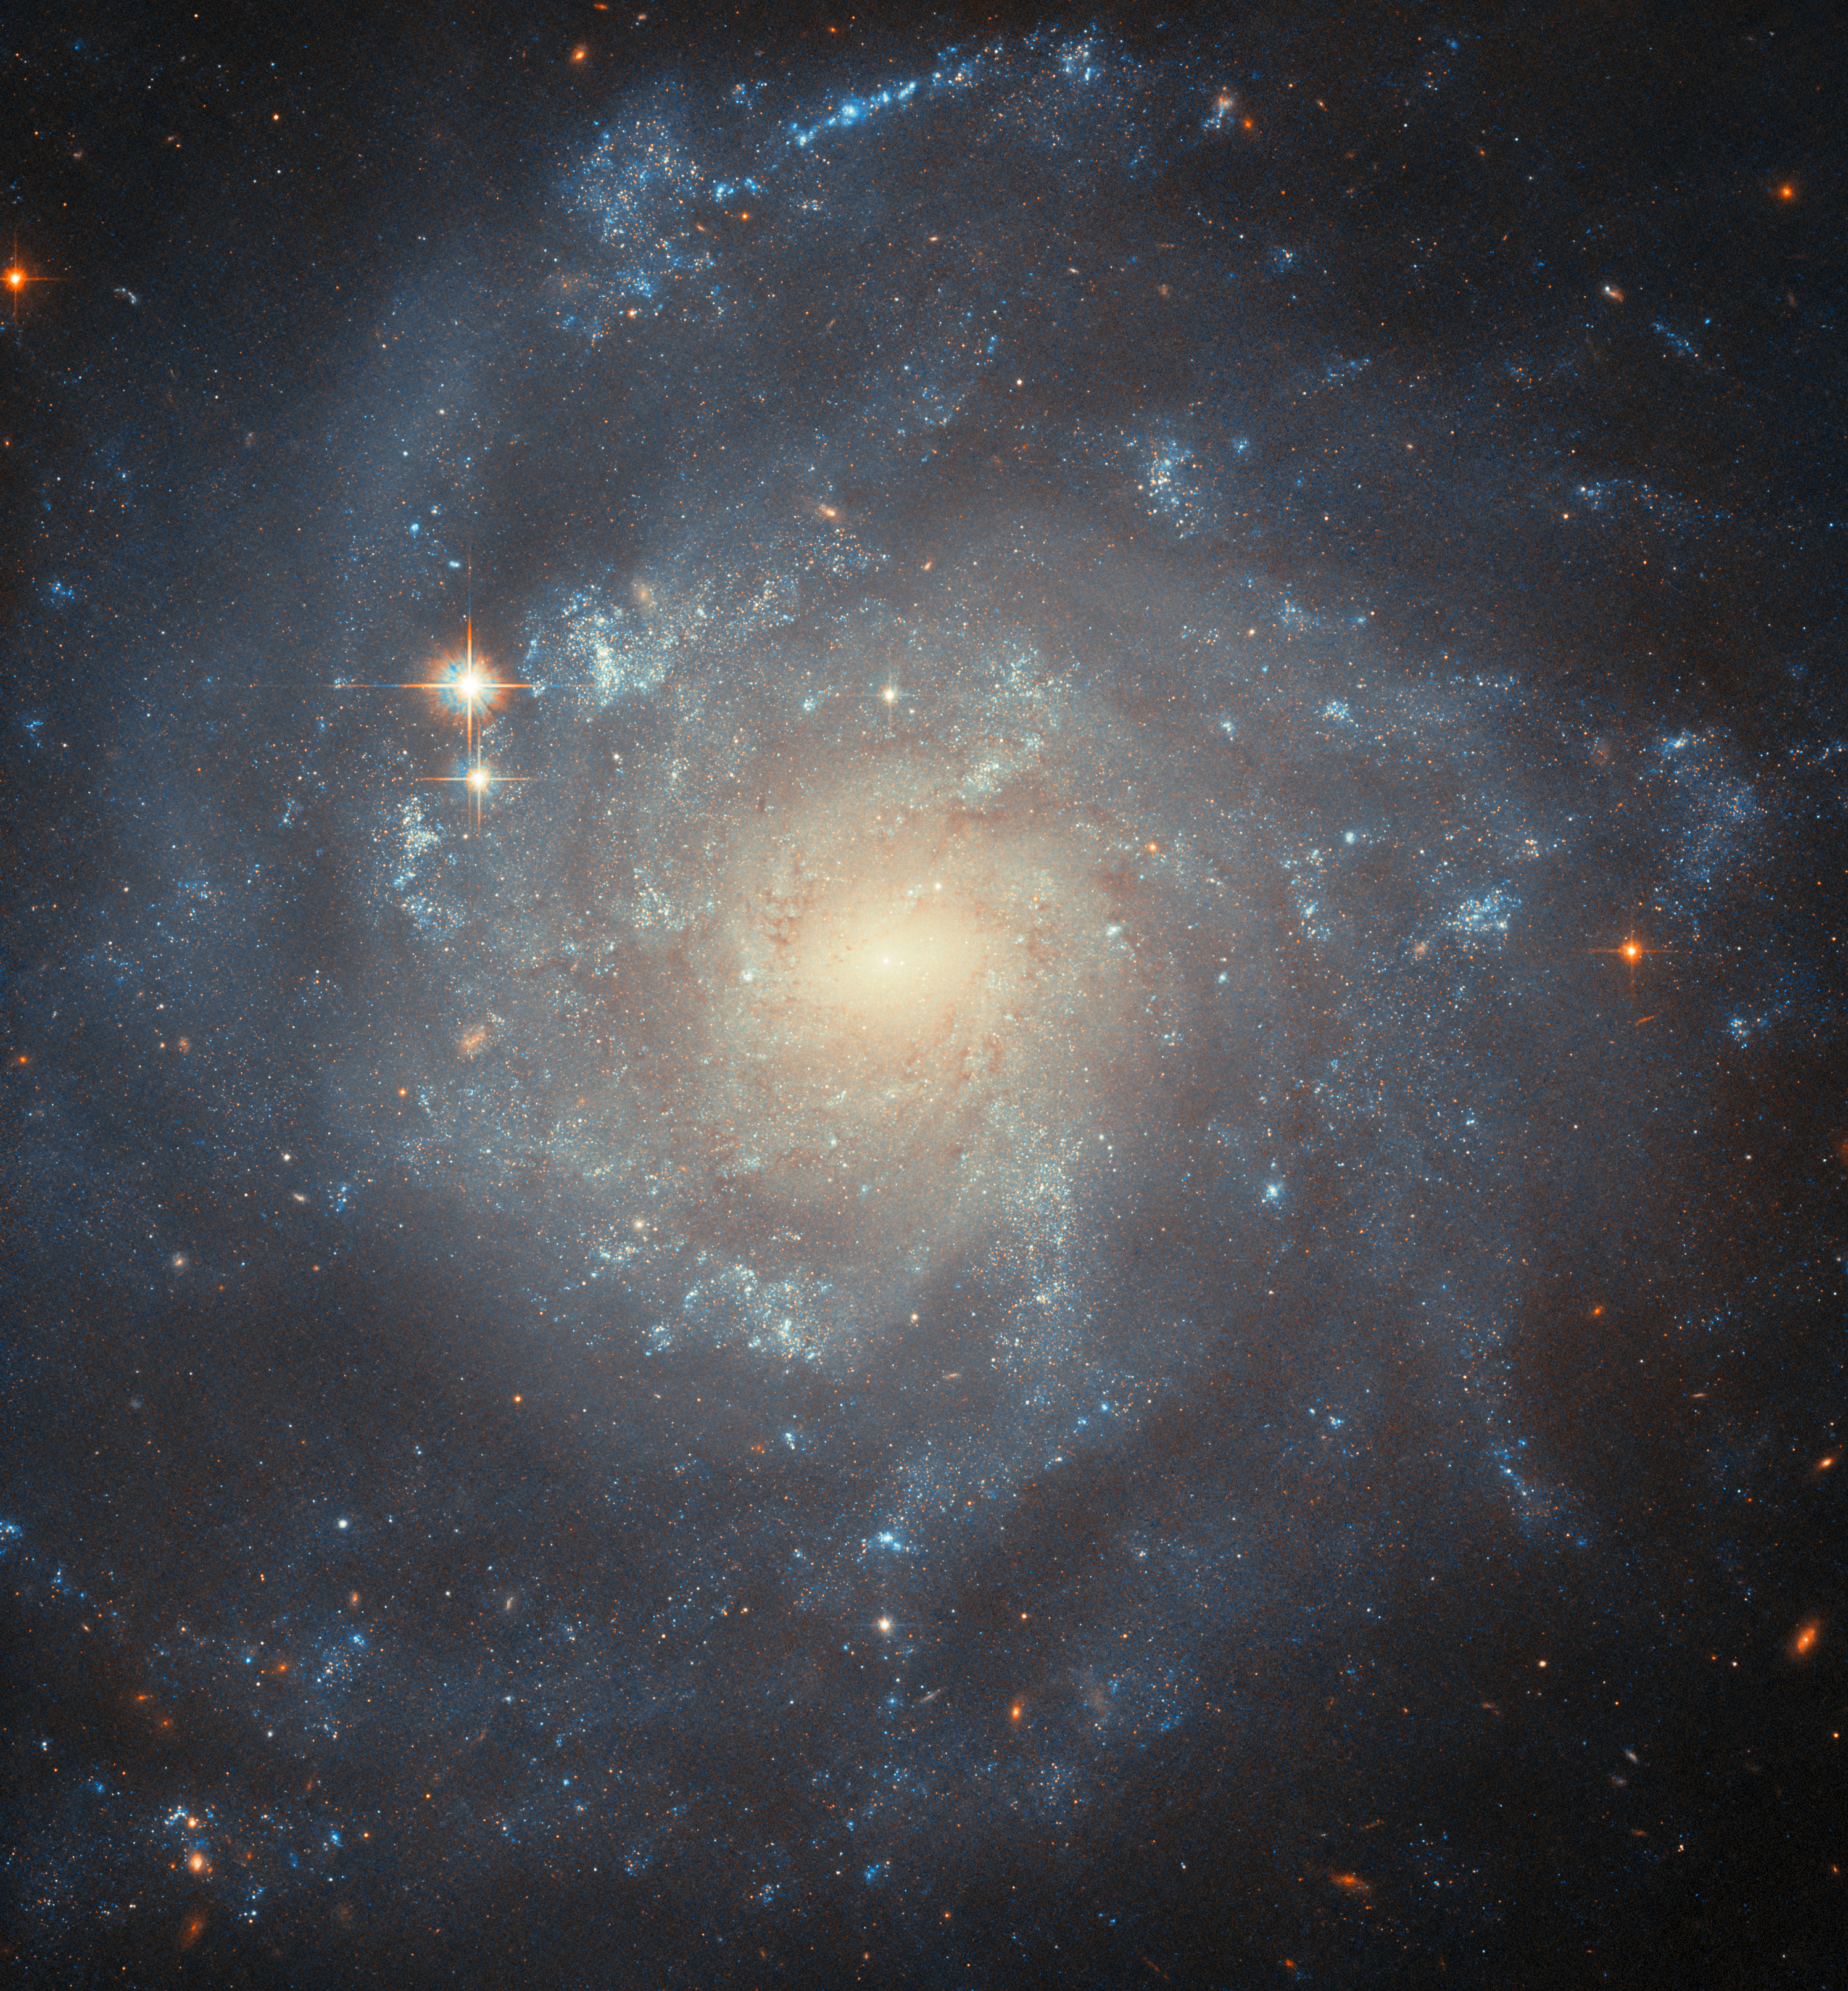

Cloudy with a chance of explosions

The subject of this Hubble Picture of the Week is a spiral galaxy in the constellation Virgo named NGC 5668. It is relatively near to us at 90 million light-years from Earth and quite accessible for astronomers to study with both space- and ground-based telescopes. At first blush, it doesn’t seem like a remarkable galaxy. It is around 90 000 light-years across, similar in size and mass to our own Milky Way galaxy, and its orientation nearly face-on to us shows open spiral arms made of cloudy, irregular patches.

One noticeable difference between the Milky Way galaxy and NGC 5668 is that this galaxy is forming new stars 60% more quickly. This fact belies a galaxy with churning clouds and flows of gas, inclement weather that forms excellent conditions for the formation of new stars! Two main drivers of star formation have been identified by astronomers. Firstly, this high-quality Hubble snapshot reveals a bar at the centre; it might look more like a slight oval shape than a real bar, but it appears to have impacted the galaxy’s star formation rate, as central bars do in many spiral galaxies. Secondly, high-velocity clouds of hydrogen gas have been tracked moving vertically between the disc of the galaxy and the spherical, faint halo which surrounds it. These can be produced by the strong stellar winds of hot, massive stars, and they contribute gas to new star-forming regions.

The enhanced star formation rate in NGC 5668 comes with a corresponding abundance of supernova explosions. Three have been spotted in the galaxy, in 1952, 1954 and 2004. In this image, Hubble was used to examine the surroundings of the Type II SN 2004G, seeking to study the kinds of stars that end their lives as this kind of supernova.

Credit: ESA/Hubble & NASA, C. Kilpatrick